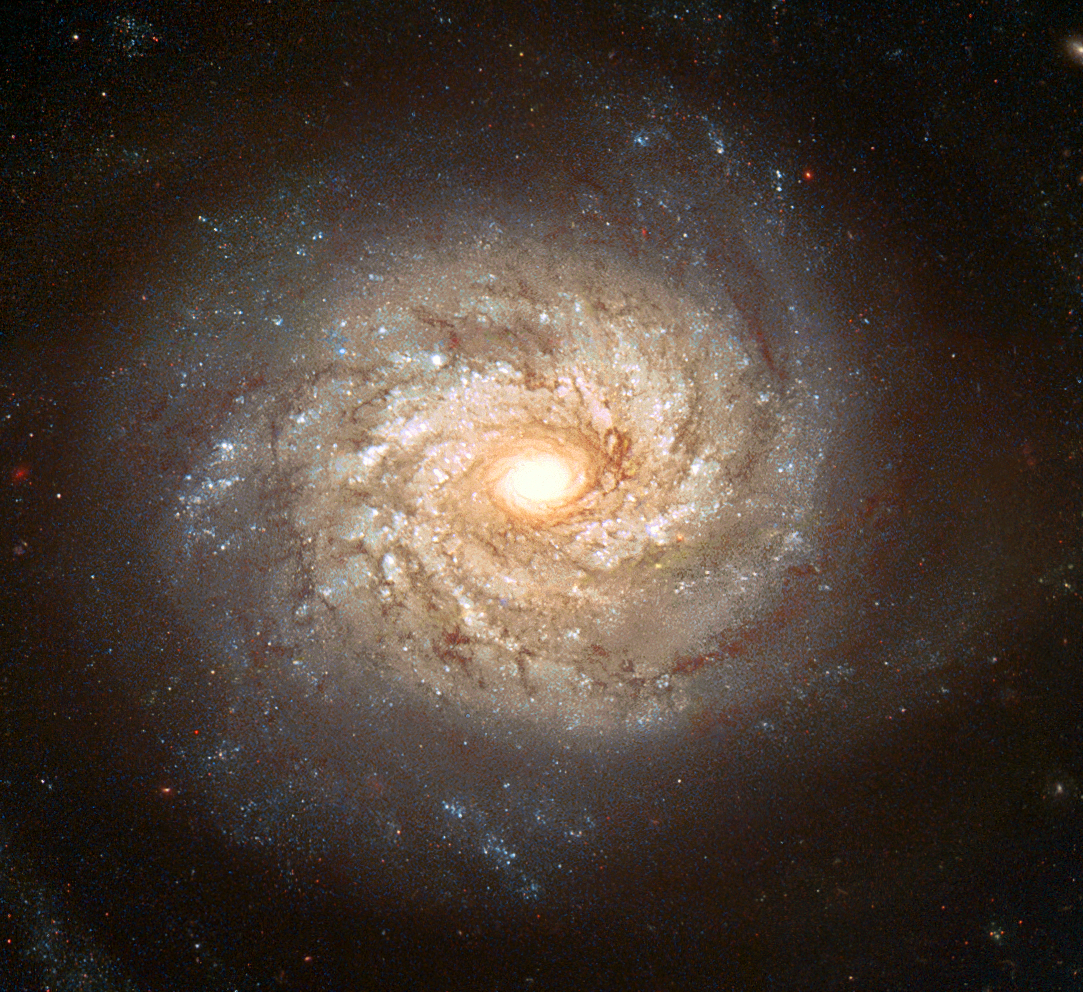

Galaxy NGC 3982

A team of European astronomers is using the NASA/ESA Hubble Space Telescope to look back in time. They have imaged the spiral galaxy NGC 3982 and hundreds of other galaxies in the hope that one of the millions of stars in these images will some day explode as a supernova. They can then look back and pinpoint the exact star that has exploded. Only two such supernova 'mother stars' have ever been identified.

Credit: European Space Agency and Stephen Smartt (University of Cambridge)